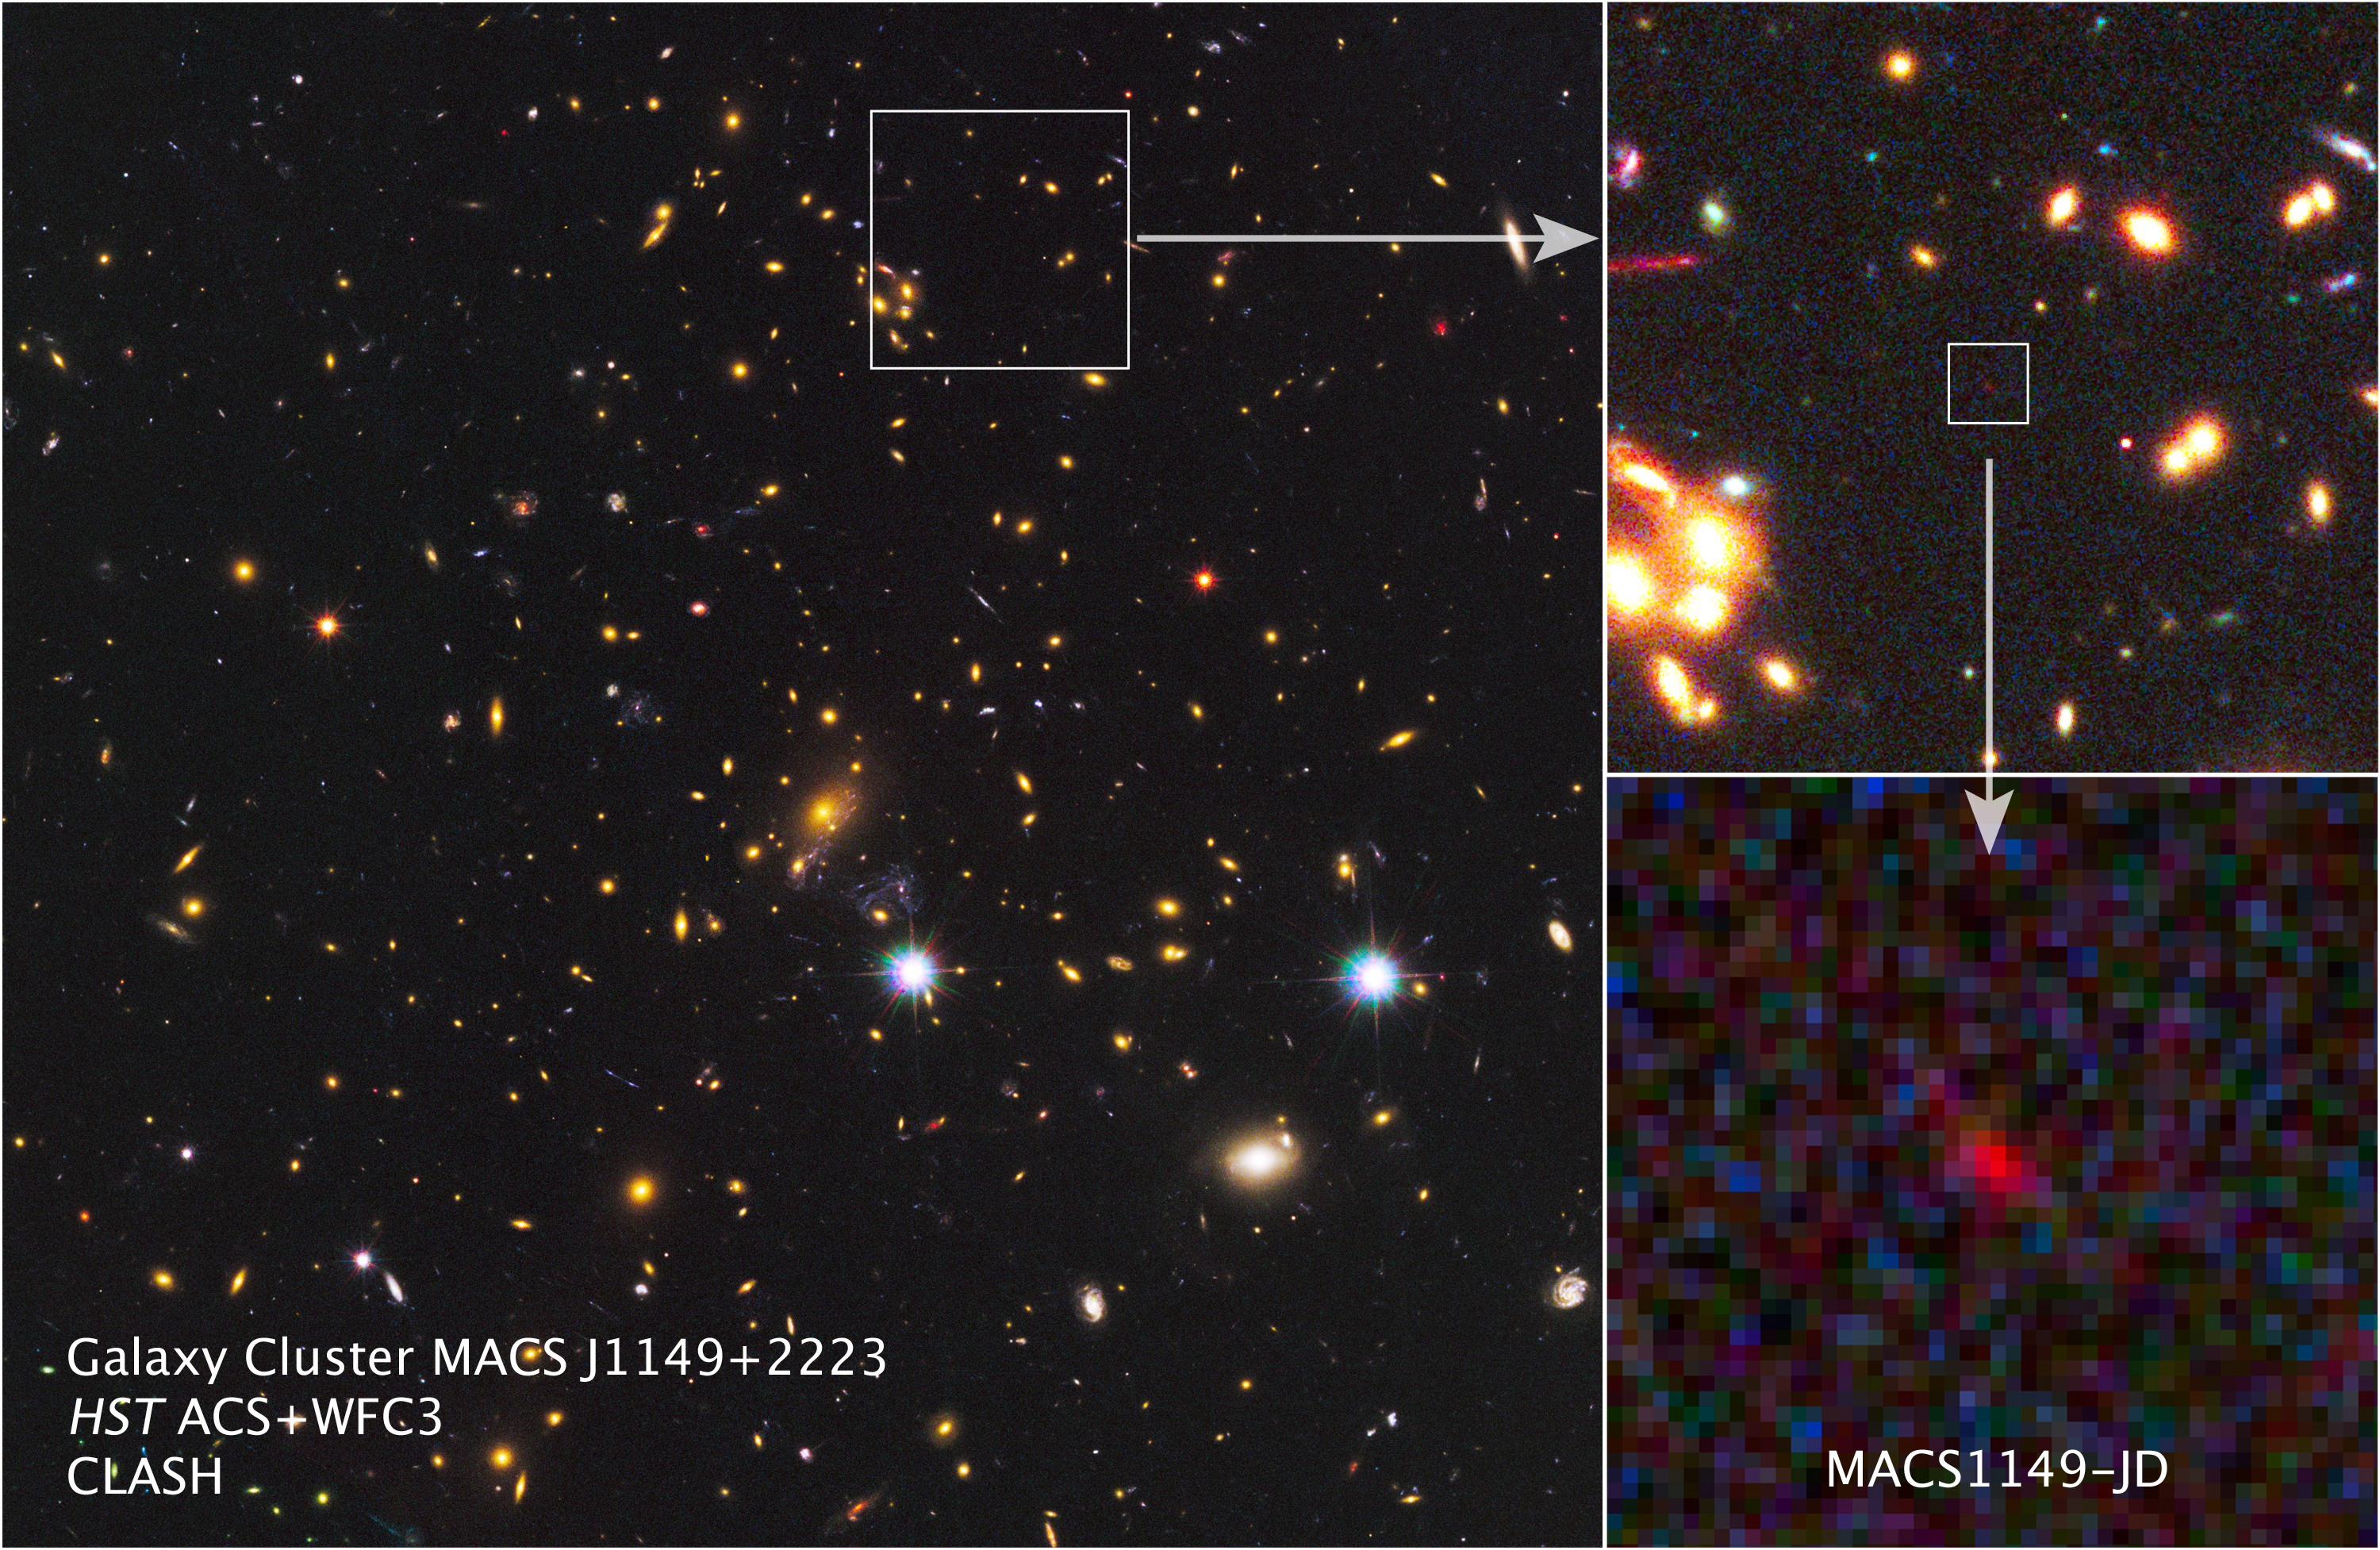

A glimmer from a dark cosmic era

With the combined power of NASA's Spitzer Space Telescope and the NASA/ESA Hubble Space Telescope, as well as a cosmic magnification effect, astronomers have spotted what could be the most distant galaxy ever seen. Light from the primordial galaxy traveled approximately 13.2 billion light-years before reaching the telescopes, shining forth from the so-called cosmic dark ages when the Universe was just 3.6 percent of its present age.

Astronomers relied on gravitational lensing to catch sight of the early, distant galaxy. In this phenomenon, predicted by Albert Einstein a century ago, the gravity of foreground objects warps and magnifies the light from background objects.

In the big image at left, the many galaxies of a massive cluster called MACS J1149+2223 dominate the scene. Gravitational lensing by the giant cluster brightened the light from the newfound galaxy, known as MACS1149-JD, some 15 times, bringing the remote object into view.

At upper right, a partial zoom-in shows MACS1149-JD in more detail, and a deeper zoom appears to the lower right. In these visible and infrared light images from Hubble, MACS1149- JD looks like a dim, red speck. The small galaxy's starlight has been stretched into longer wavelengths, or "redshifted," by the expansion of the universe. MACS1149-JD's stars originally emitted the infrared light seen here at much shorter, higher-energy wavelengths, such as ultraviolet.

The far-off galaxy existed within an important era when the universe transformed from a starless expanse during the dark ages to a recognizable cosmos full of galaxies. The discovery of the faint, small galaxy opens a window onto the deepest, remotest epochs of cosmic history.

Credit: NASA, ESA, W. Zheng (JHU), M. Postman (STScI), and the CLASH Team